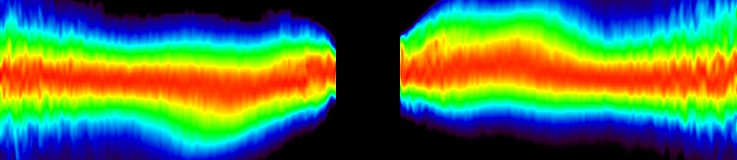

Circumstellar Disk Around Beta Pictoris

An unprecedented detailed close-up view of the inner region of the disk taken with the Space Telescope Imaging Spectrograph shows a warp in the disk. Though this warp was first seen by Hubble in 1995, the new images go closer to the star than ever before to about 1.4 billion miles (15 astronomical units) -- a radius smaller than that of Uranus' orbit. These new details support the presence of one or more planets orbiting the star. The image was taken in September 1997.

Credit: Sally Heap (GSFC/NASA/ESA)